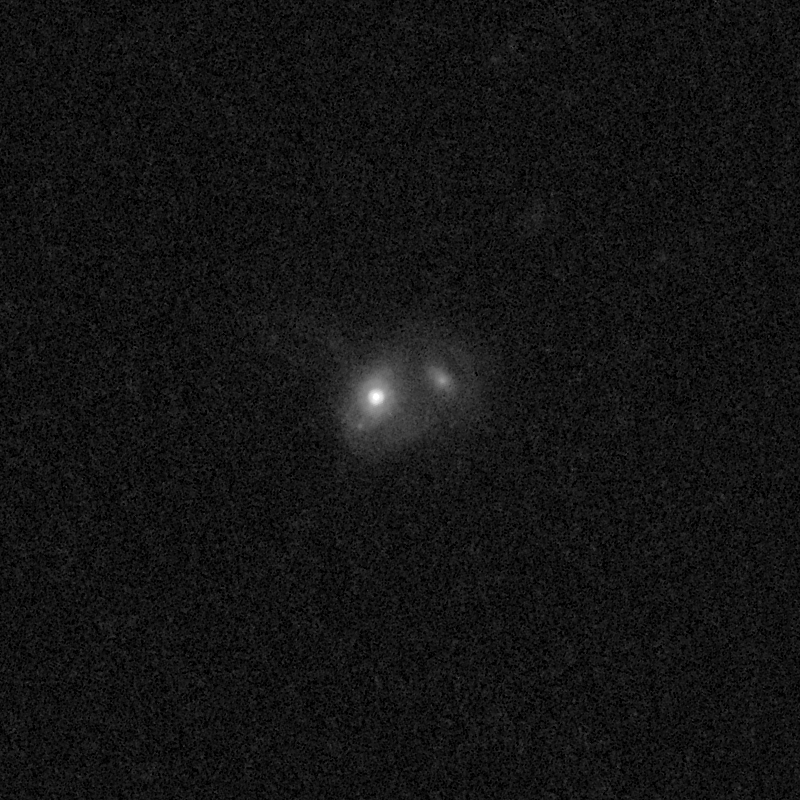

Outflows from merging galaxy J1506+6131

This NASA/ESA Hubble Space Telescope image of the galaxy J1506+6131 shows it is undergoing a firestorm of star birth, as shown by its bright white cores.

This star-making frenzy was ignited by mergers with other galaxies. The odd shape of the galaxy is telltale evidence of a close encounters.

The new Hubble Wide Field Camera 3 observations of this and eleven other galaxies undergoing the same process suggest that energy from the star-birthing frenzies created powerful winds that are blowing out the gas, meaning it is not available to form future generations of stars.

This activity occurred when the Universe was half its current age of 13.7 billion years. The gas-poor galaxies may eventually become so-called red and dead galaxies, composed only of aging stars.

This Hubble false-colour image was processed to bring out important details in the galaxy. The images were taken in 2010.

Credit: NASA, ESA, and P. Sell (Texas Tech University)